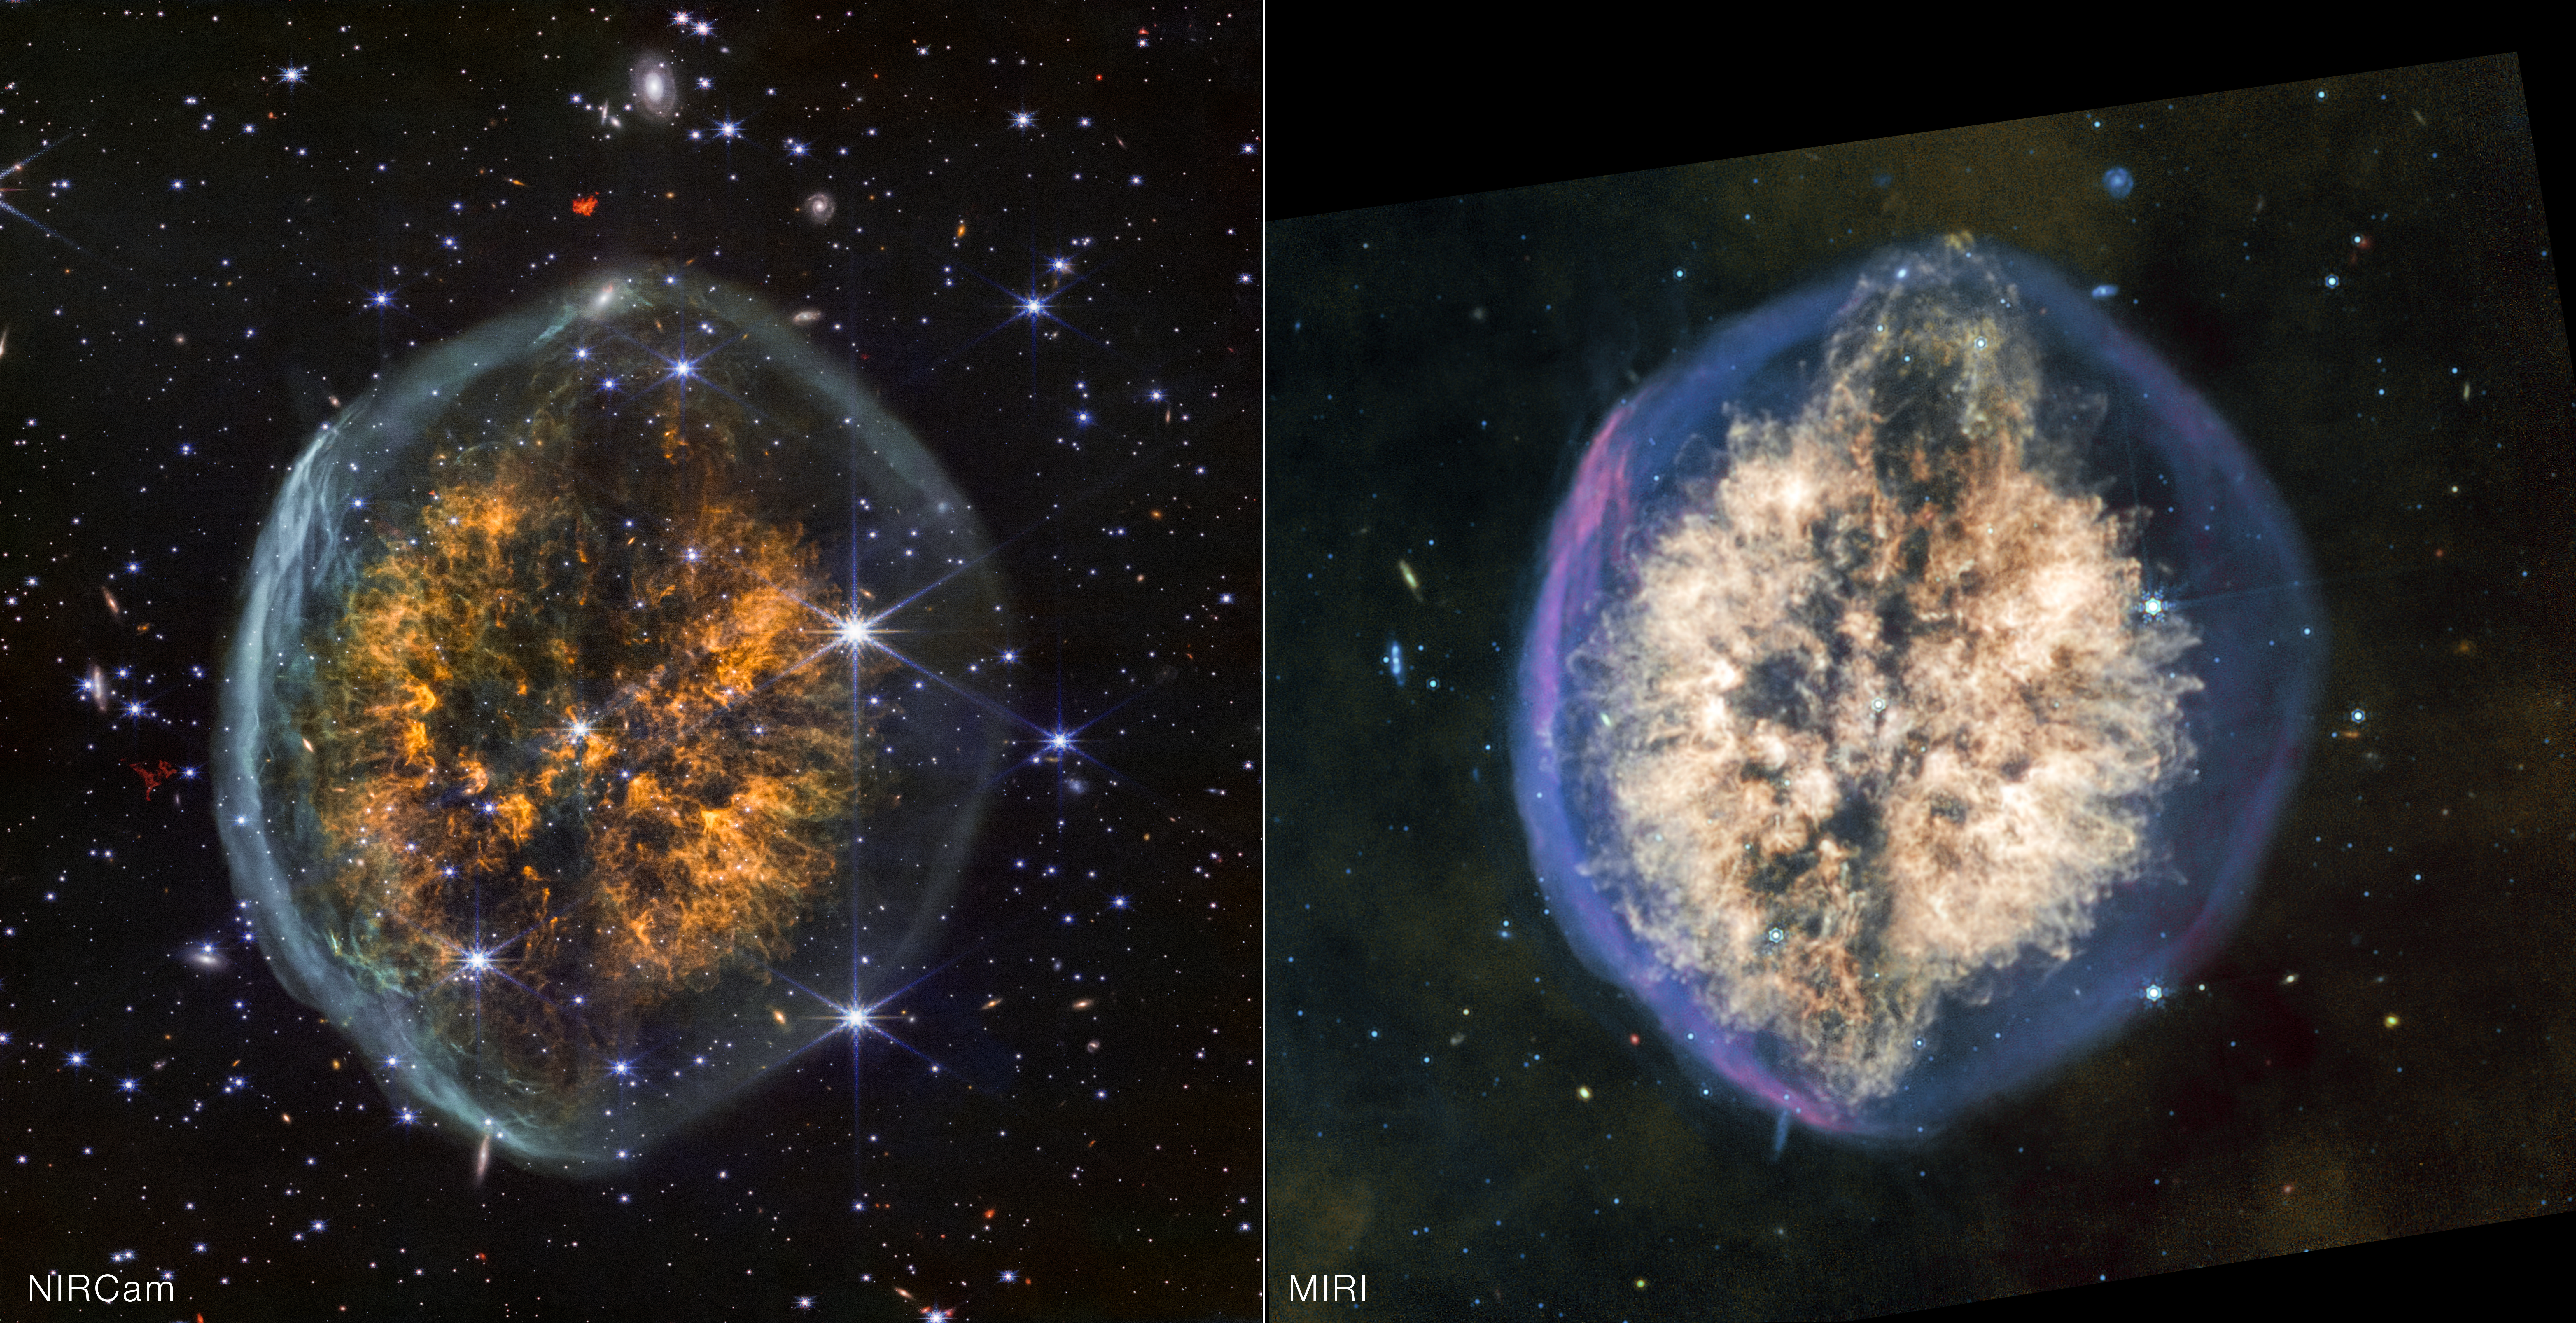

Exposed Cranium Nebula (NIRCam and MIRI images)

The differences in what Webb’s infrared instruments reveal and conceal within the PMR 1 “Exposed Cranium” nebula is apparent in this side-by-side view. More stars and background galaxies shine through the view of Webb’s NIRCam (Near-Infrared Camera), while cosmic dust glows more prominently in the light captured by MIRI (Mid-Infrared Instrument).

The dark centre lane that contributes to this nebula’s distinctive brain-like appearance is more noticeable in NIRCam, but its apparent role in the ejection of material at the top and bottom of the nebula is seen more clearly in MIRI’s view. Observing the cosmos in various wavelengths of light provides a more complete picture of how the universe works.

Credit: NASA, ESA, CSA, STScI, Image Processing: Joseph DePasquale (STScI)